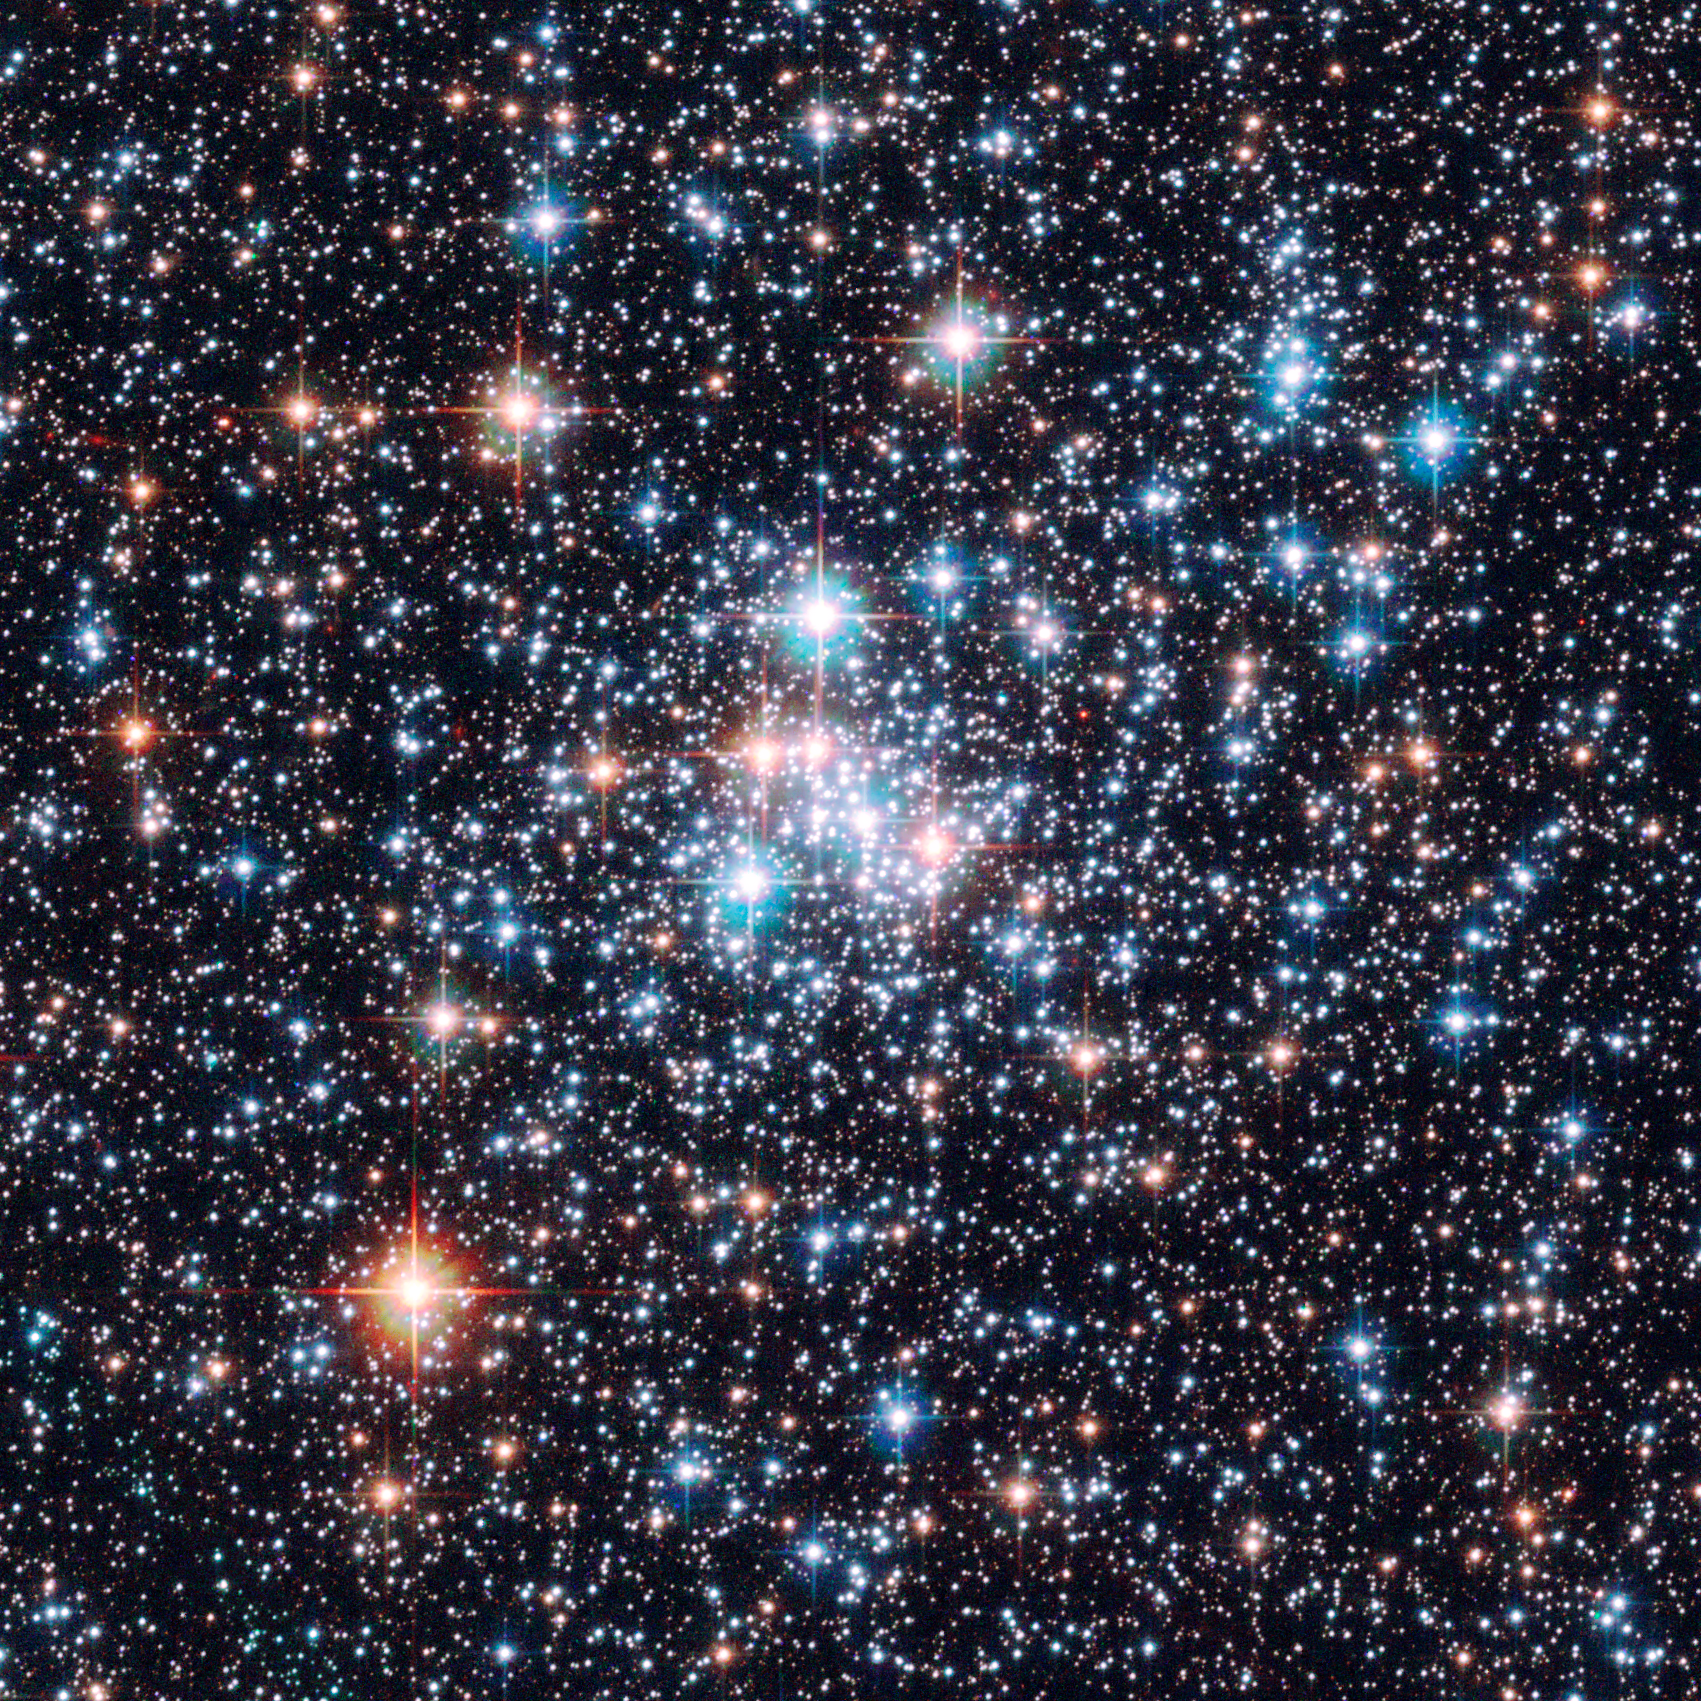

Magellanic gemstone in the southern sky [NGC 290]

Hubble has captured the most detailed image to date of the open star cluster NGC 290 in the Small Magellanic Cloud.

The image taken with the Advanced Camera for Surveys onboard the NASA/ESA Hubble Space Telescope show a myriad of stars in crystal clear detail. The brilliant open star cluster, NGC 290, is located about 200,000 light-years away and is roughly 65 light-years across.

Credit: European Space Agency & NASA
Acknowledgements:
Davide De Martin (ESA/Hubble) and Edward W. Olszewski (University of Arizona, USA)